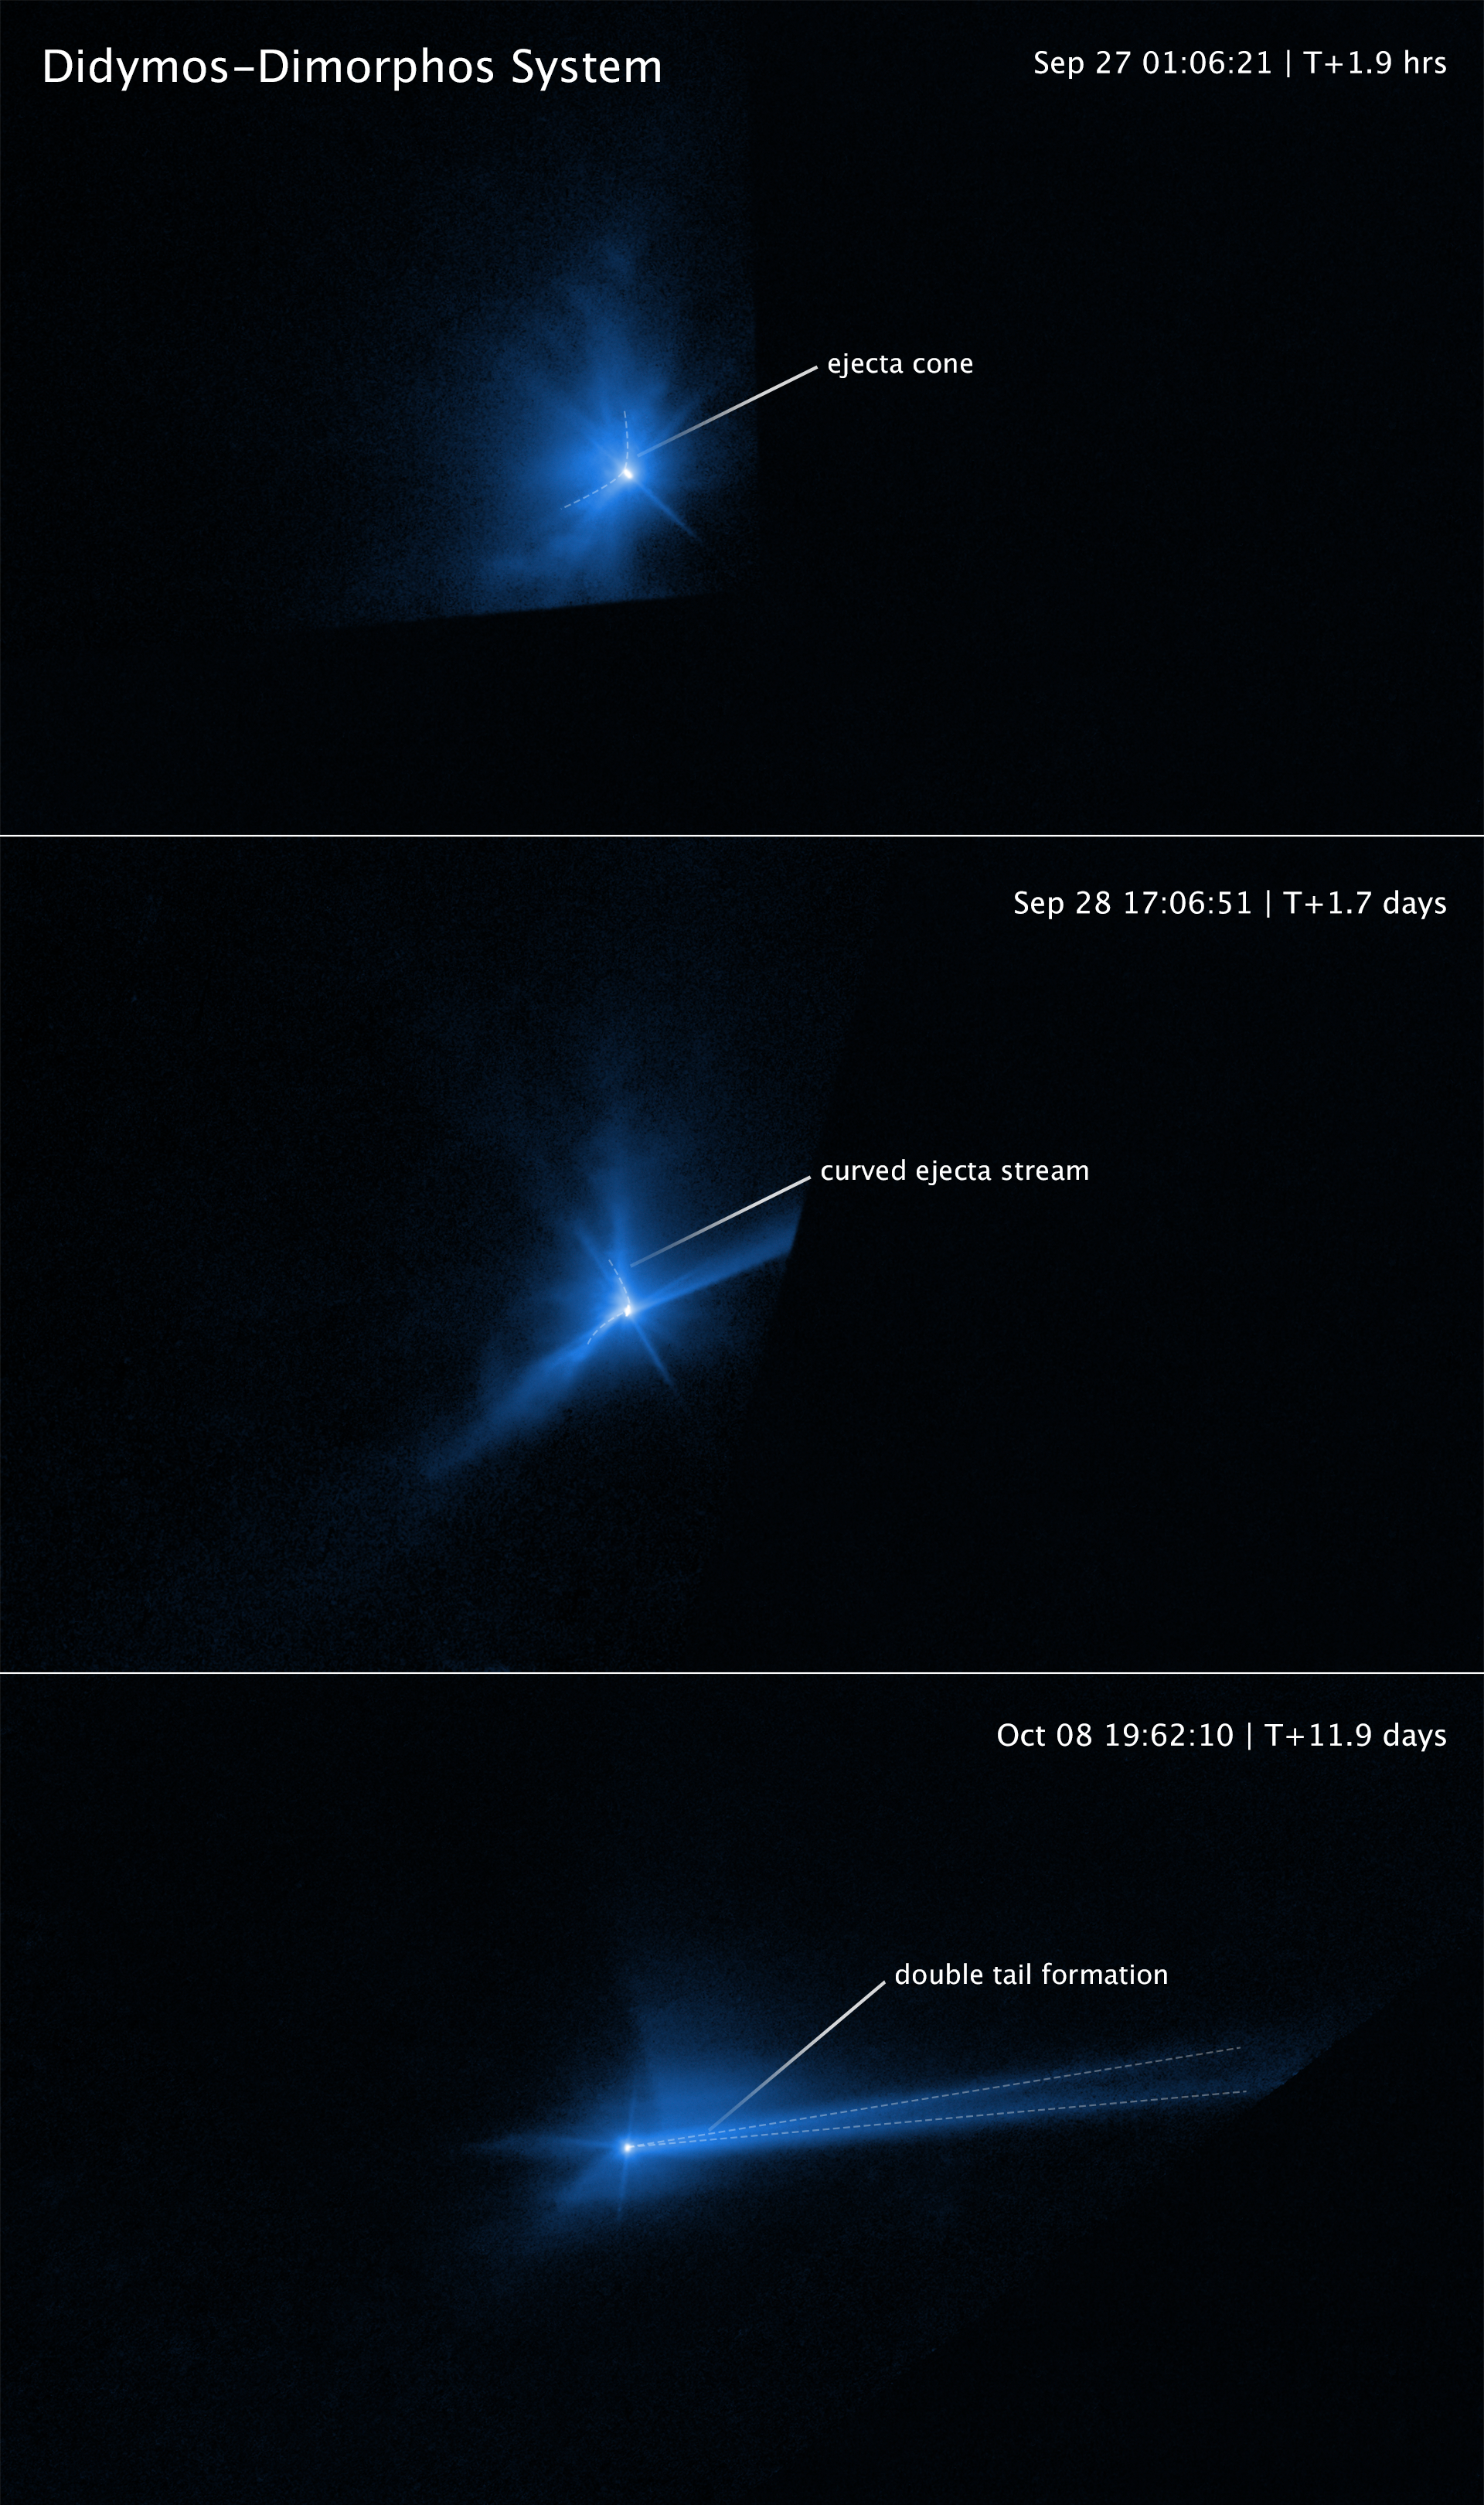

Hubble captures DART asteroid impact debris (annotated 1)

These three panels capture the breakup of the asteroid Dimorphos when it was deliberately hit by NASA’s 545-kilogram Double Asteroid Redirection Test (DART) mission spacecraft on 26 September 2022. The NASA/ESA Hubble Space Telescope had a ringside view of the space demolition derby. The top panel, taken 2 hours after impact, shows an ejecta cone amounting to an estimated 900 000 kilograms of dust.

The centre frame shows the dynamic interaction within the asteroid’s binary system that starts to distort the cone shape of the ejecta pattern about 17 hours after the impact. The most prominent structures are rotating, pinwheel-shaped features. The pinwheel is tied to the gravitational pull of the companion asteroid, Didymos.

In the bottom frame Hubble next captures the debris being swept back into a comet-like tail by the pressure of sunlight on the tiny dust particles. This stretches out into a debris train where the lightest particles travel the fastest and farthest from the asteroid. The mystery is compounded when Hubble records the tail splitting in two for a few days.

Credit: NASA, ESA, STScI, J. Li (PSI)